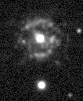

Recurring Nova T Pyxidis

This image, taken by a ground-based telescope, shows shells of gas around the star that were blown off during several eruptions.

Credit: Mike Shara, Bob Williams, and David Zurek ( Space Telescope Science Institute); Roberto Gilmozzi (European Southern Observatory); Dina Prialnik (Tel Aviv University); and NASA/ESA